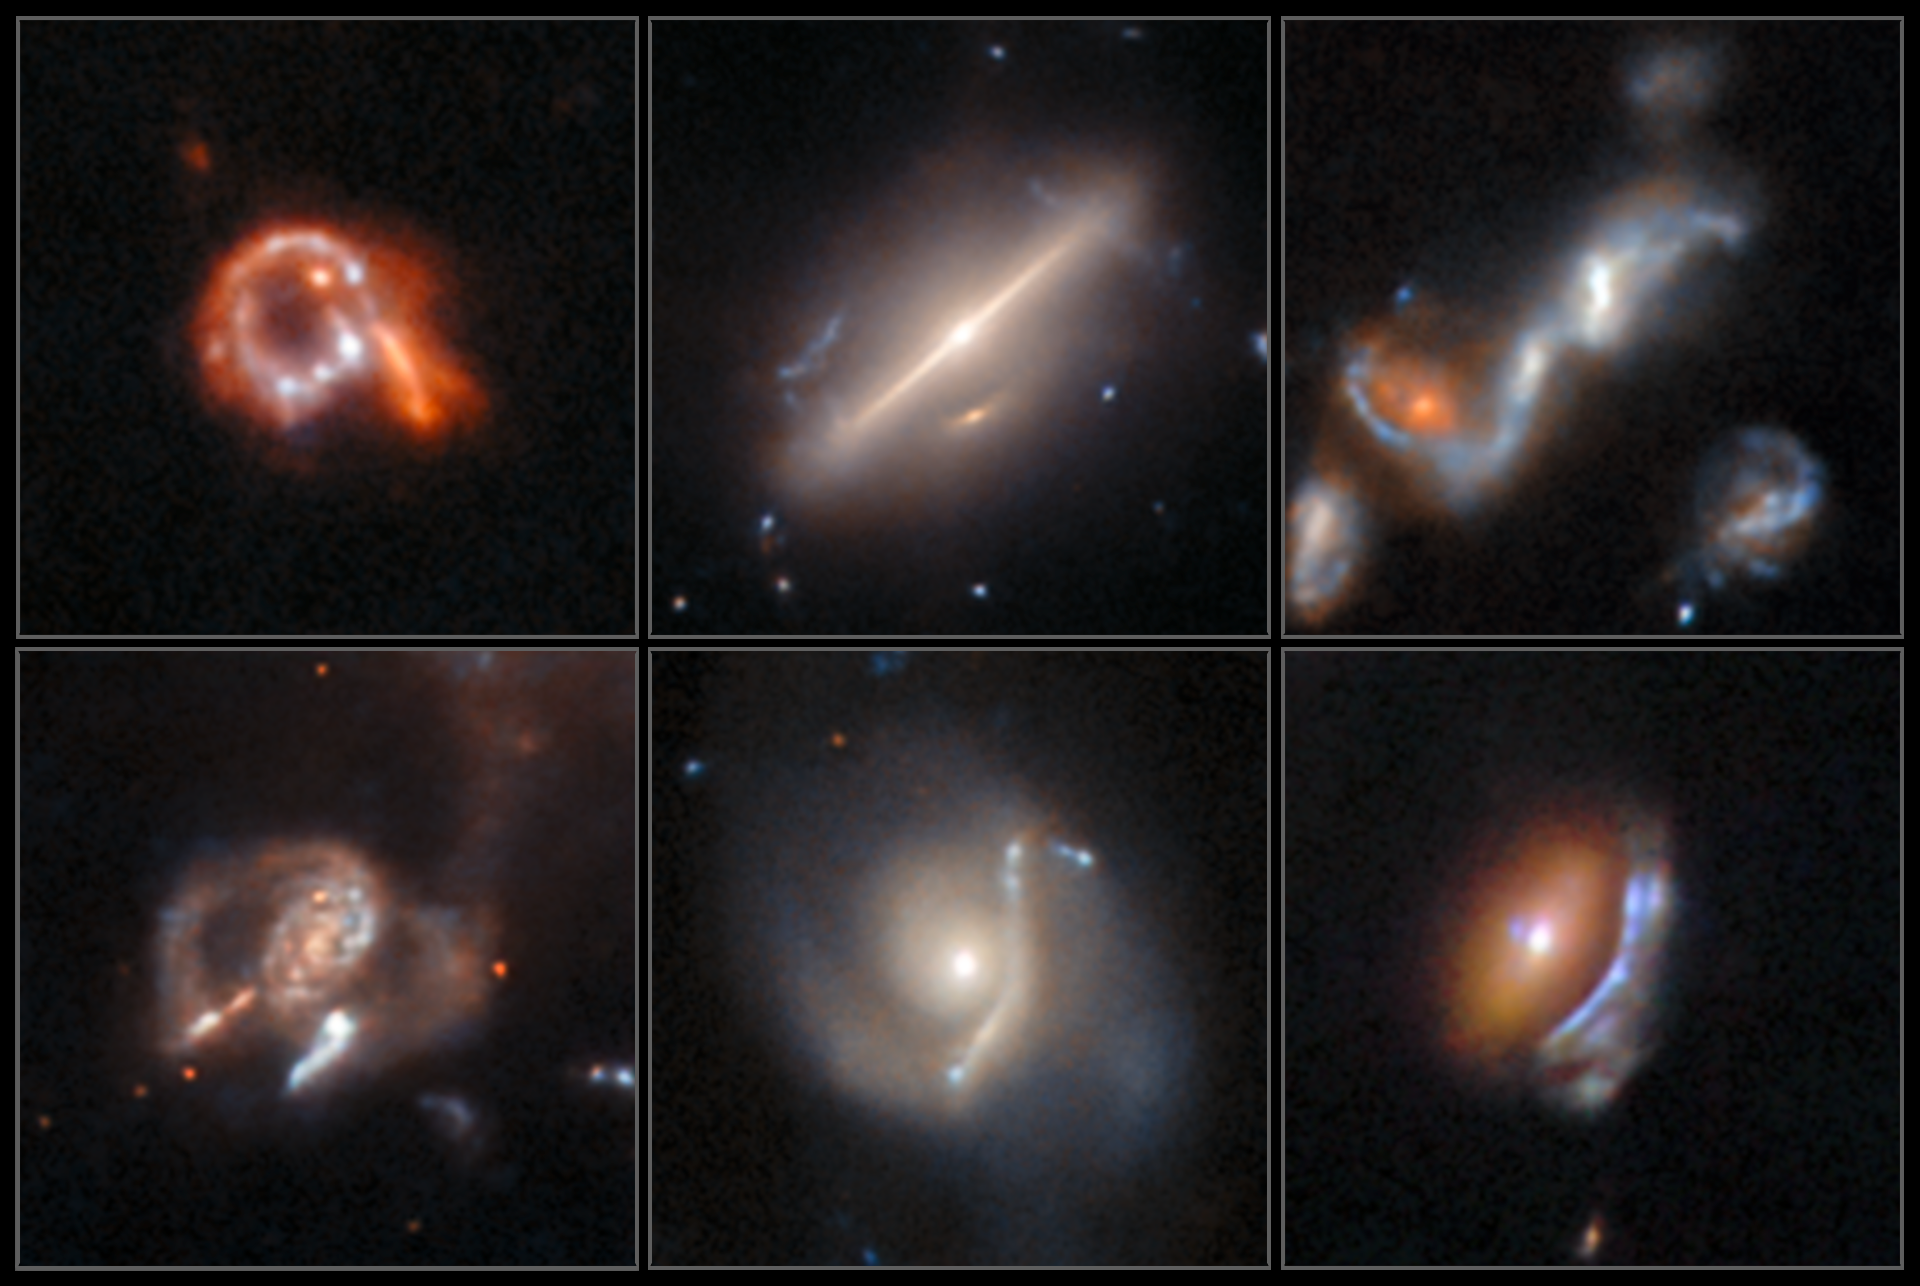

Astrophysical anomalies from Hubble’s archive

Six previously-undiscovered, weird and fascinating astrophysical objects are displayed in this new image from the NASA/ESA Hubble Space Telescope. These were discovered by researchers from the European Space Agency using a new AI-assisted method. The AI tool allowed them to search nearly 100 million image cutouts and uncover anomalous objects including gravitational lenses, jellyfish galaxies with gaseous ‘tentacles’, merging and interacting galaxies, galaxies featuring rings and arcs and more.

This collection features six galaxies, showing a cross-section of the discoveries with some of the more striking examples: three lenses with arcs distorted by gravity, one galactic merger, one ring galaxy, and one galaxy — not alone in the results — which defied classification.

To detect anomalous objects like these six, the researchers developed an AI tool capable of searching and recognising patterns in images, and trained it with examples of types of unusual objects that they wanted to find. They then used their algorithm to examine the entire set of data from Hubble’s archive in search of further anomalous objects, over the course of just a couple of days. The result was a ranking of which images contained objects most likely to be anomalous.

After inspecting the results from their AI tool, the team confirmed almost 1400 anomalies, of which over 800 were previously unknown. With even larger datasets on the way from missions including ESA’s Euclid, the hope is that AI tools such as this one can help astronomers to make the absolute most of their observations.

Read more about this new research here.

Credit: ESA/Hubble & NASA, D. O’Ryan, P. Gómez (European Space Agency), M. Zamani (ESA/Hubble)